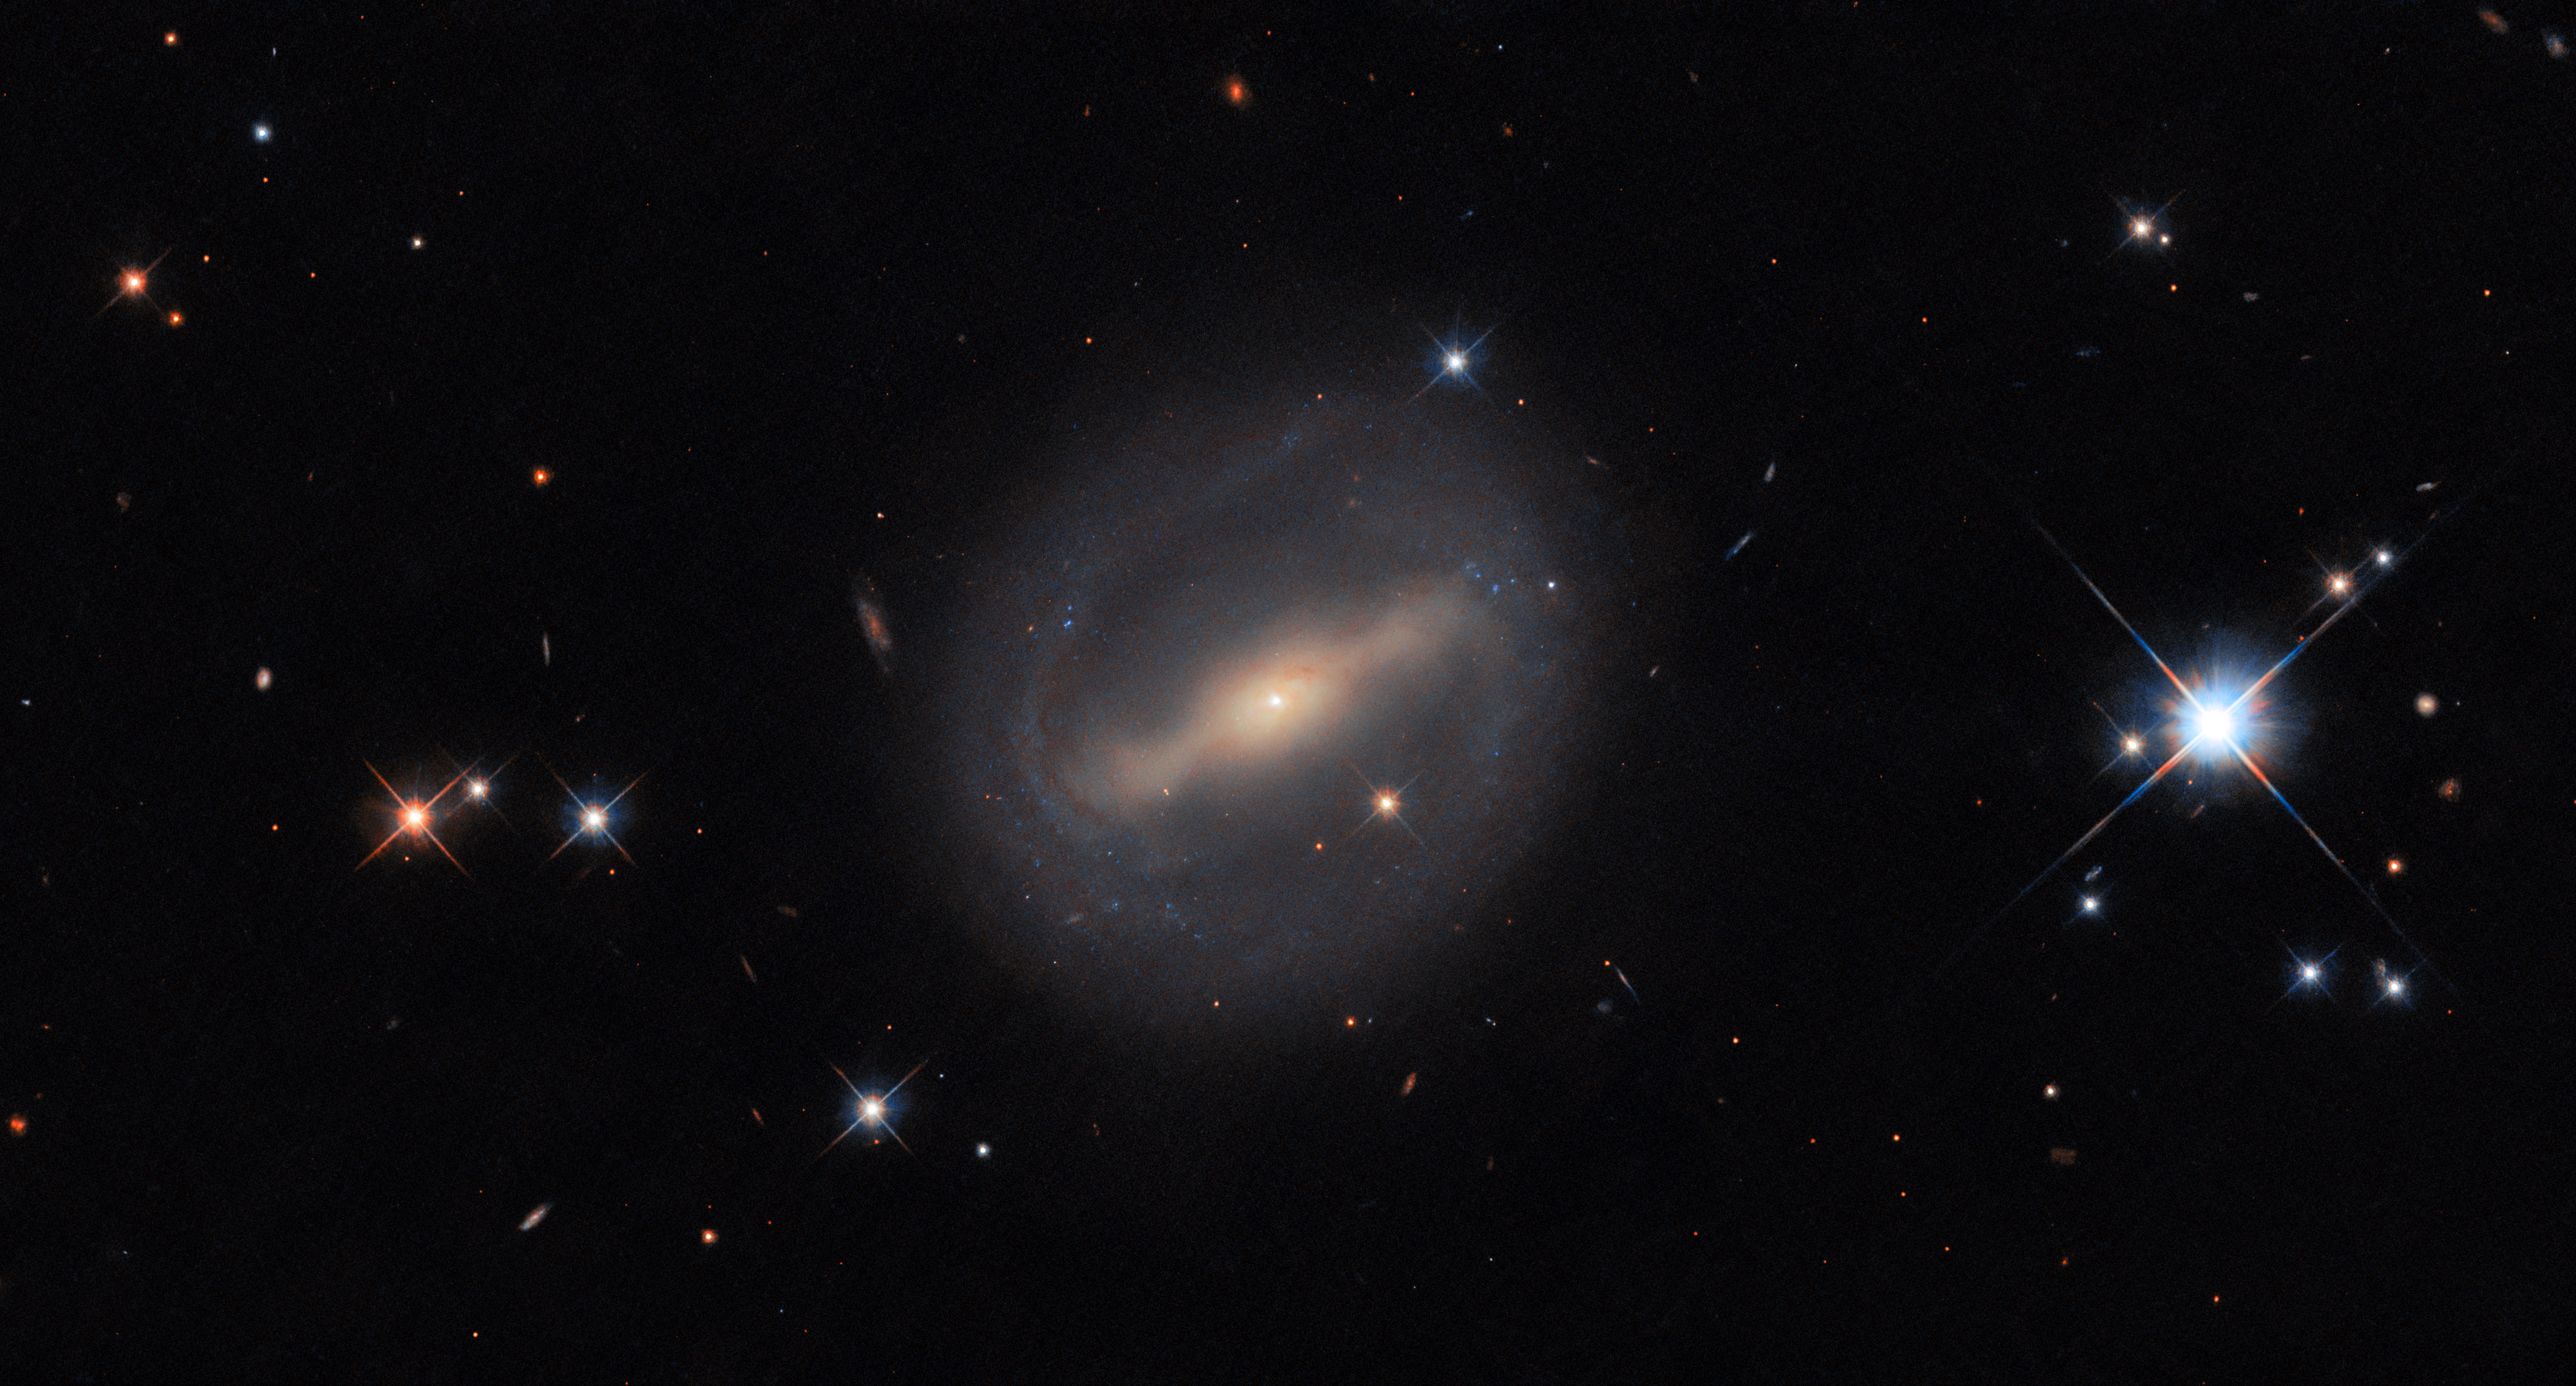

Rings and things

The subject of this week’s circular Hubble Picture of the Week is situated in the Perseus Cluster, also known as Abell 426, 320 million light-years from Earth. It’s a barred spiral galaxy known as MCG+07-07-072, seen here among a number of photobombing stars that are much closer to Earth than it is.

MCG+07-07-072 has quite an unusual shape, for a spiral galaxy, with thin arms emerging from the ends of its barred core to draw a near-circle around its disc. It is classified, using a common extension of the basic Hubble scheme, as an SBc(r) galaxy: the c denotes that its two spiral arms are loosely wound, each only performing a half-turn around the galaxy, and the (r) is for the ring-like structure they create. Rings in galaxies come in quite a few forms, from merely uncommon, to rare and astrophysically important!

Lenticular galaxies are a type that sit between elliptical and spiral galaxies. They feature a large disc, unlike an elliptical galaxy, but lack any spiral arms. Lenticular means lens-shaped, and these galaxies often feature ring-like shapes in their discs. Meanwhile, the classification of “ring galaxy” is reserved for peculiar galaxies with a round ring of gas and star formation, much like spiral arms look, but completely disconnected from the galactic nucleus - or even without any visible nucleus! They’re thought to be formed in galactic collisions. Finally, there are the famous gravitational lenses, where the ring is in fact a distorted image of a distant, background galaxy, formed by the ‘lens’ galaxy bending light around it. Ring-shaped images, called Einstein rings, only form when the lensing and imaged galaxies are perfectly aligned.

Credit: ESA/Hubble & NASA, I. Chilingarian